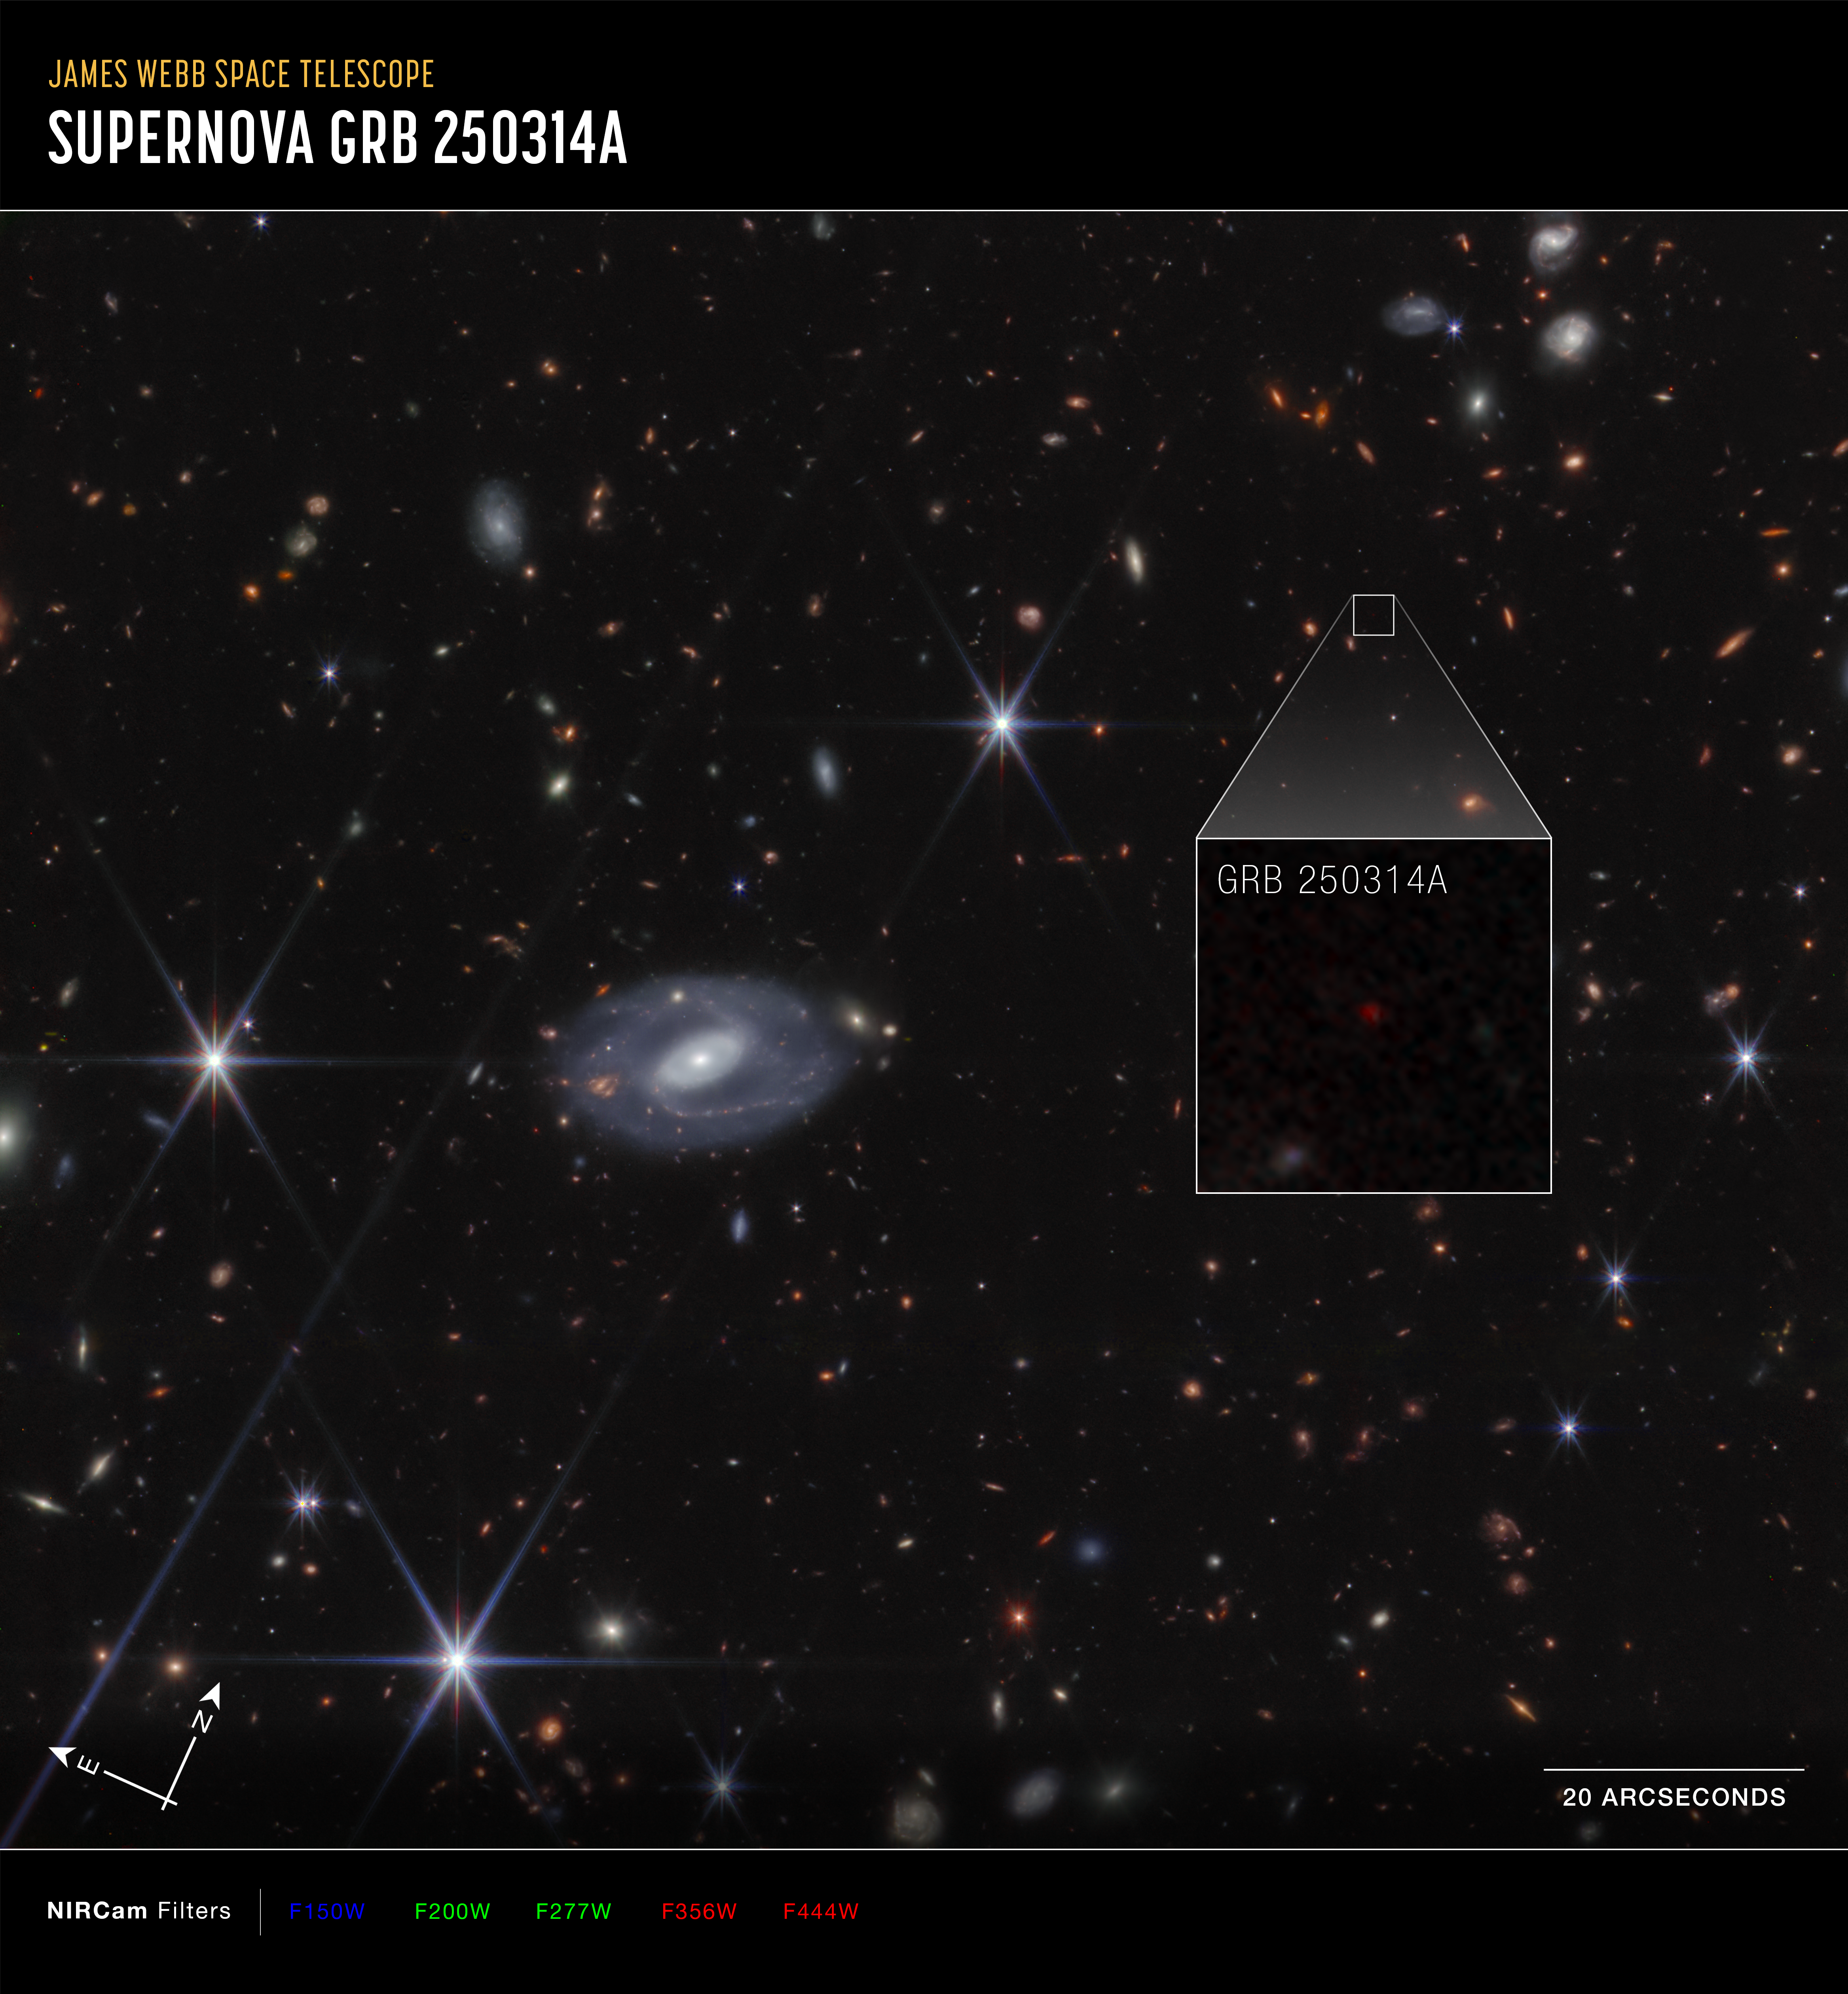

GRB 250314A Pull-out (Compass NIRCam image, annotated)

This image of supernova GRB 250314A, captured by the NASA/ESA/CSA James Webb Space Telescope’s Near Infrared Camera (NIRCam), shows compass arrows, scale bar, and colour key for reference.

The north and east compass arrows show the orientation of the image on the sky. Note that the relationship between north and east on the sky (as seen from below) is flipped relative to direction arrows on a map of the ground (as seen from above).

The scale bar is labeled in arcseconds, a measure of angular distance on the sky. One arcsecond is equal to an angular measurement of 1/3600 of one degree. There are 60 arcminutes in a degree and 60 arcseconds in an arcminute. (The full Moon has an angular diameter of about 30 arcminutes.) The actual size of an object that covers one arcsecond on the sky depends on its distance from the telescope.

This image shows invisible near-infrared wavelengths of light that have been translated into visible-light colours. The colour key shows which NIRCam filters were used when collecting the light. The colour of each filter name is the visible light colour used to represent the infrared light that passes through that filter.

Credit: NASA, ESA, CSA, STScI, A. Levan (IMAPP), Image Processing: A. Pagan (STScI)